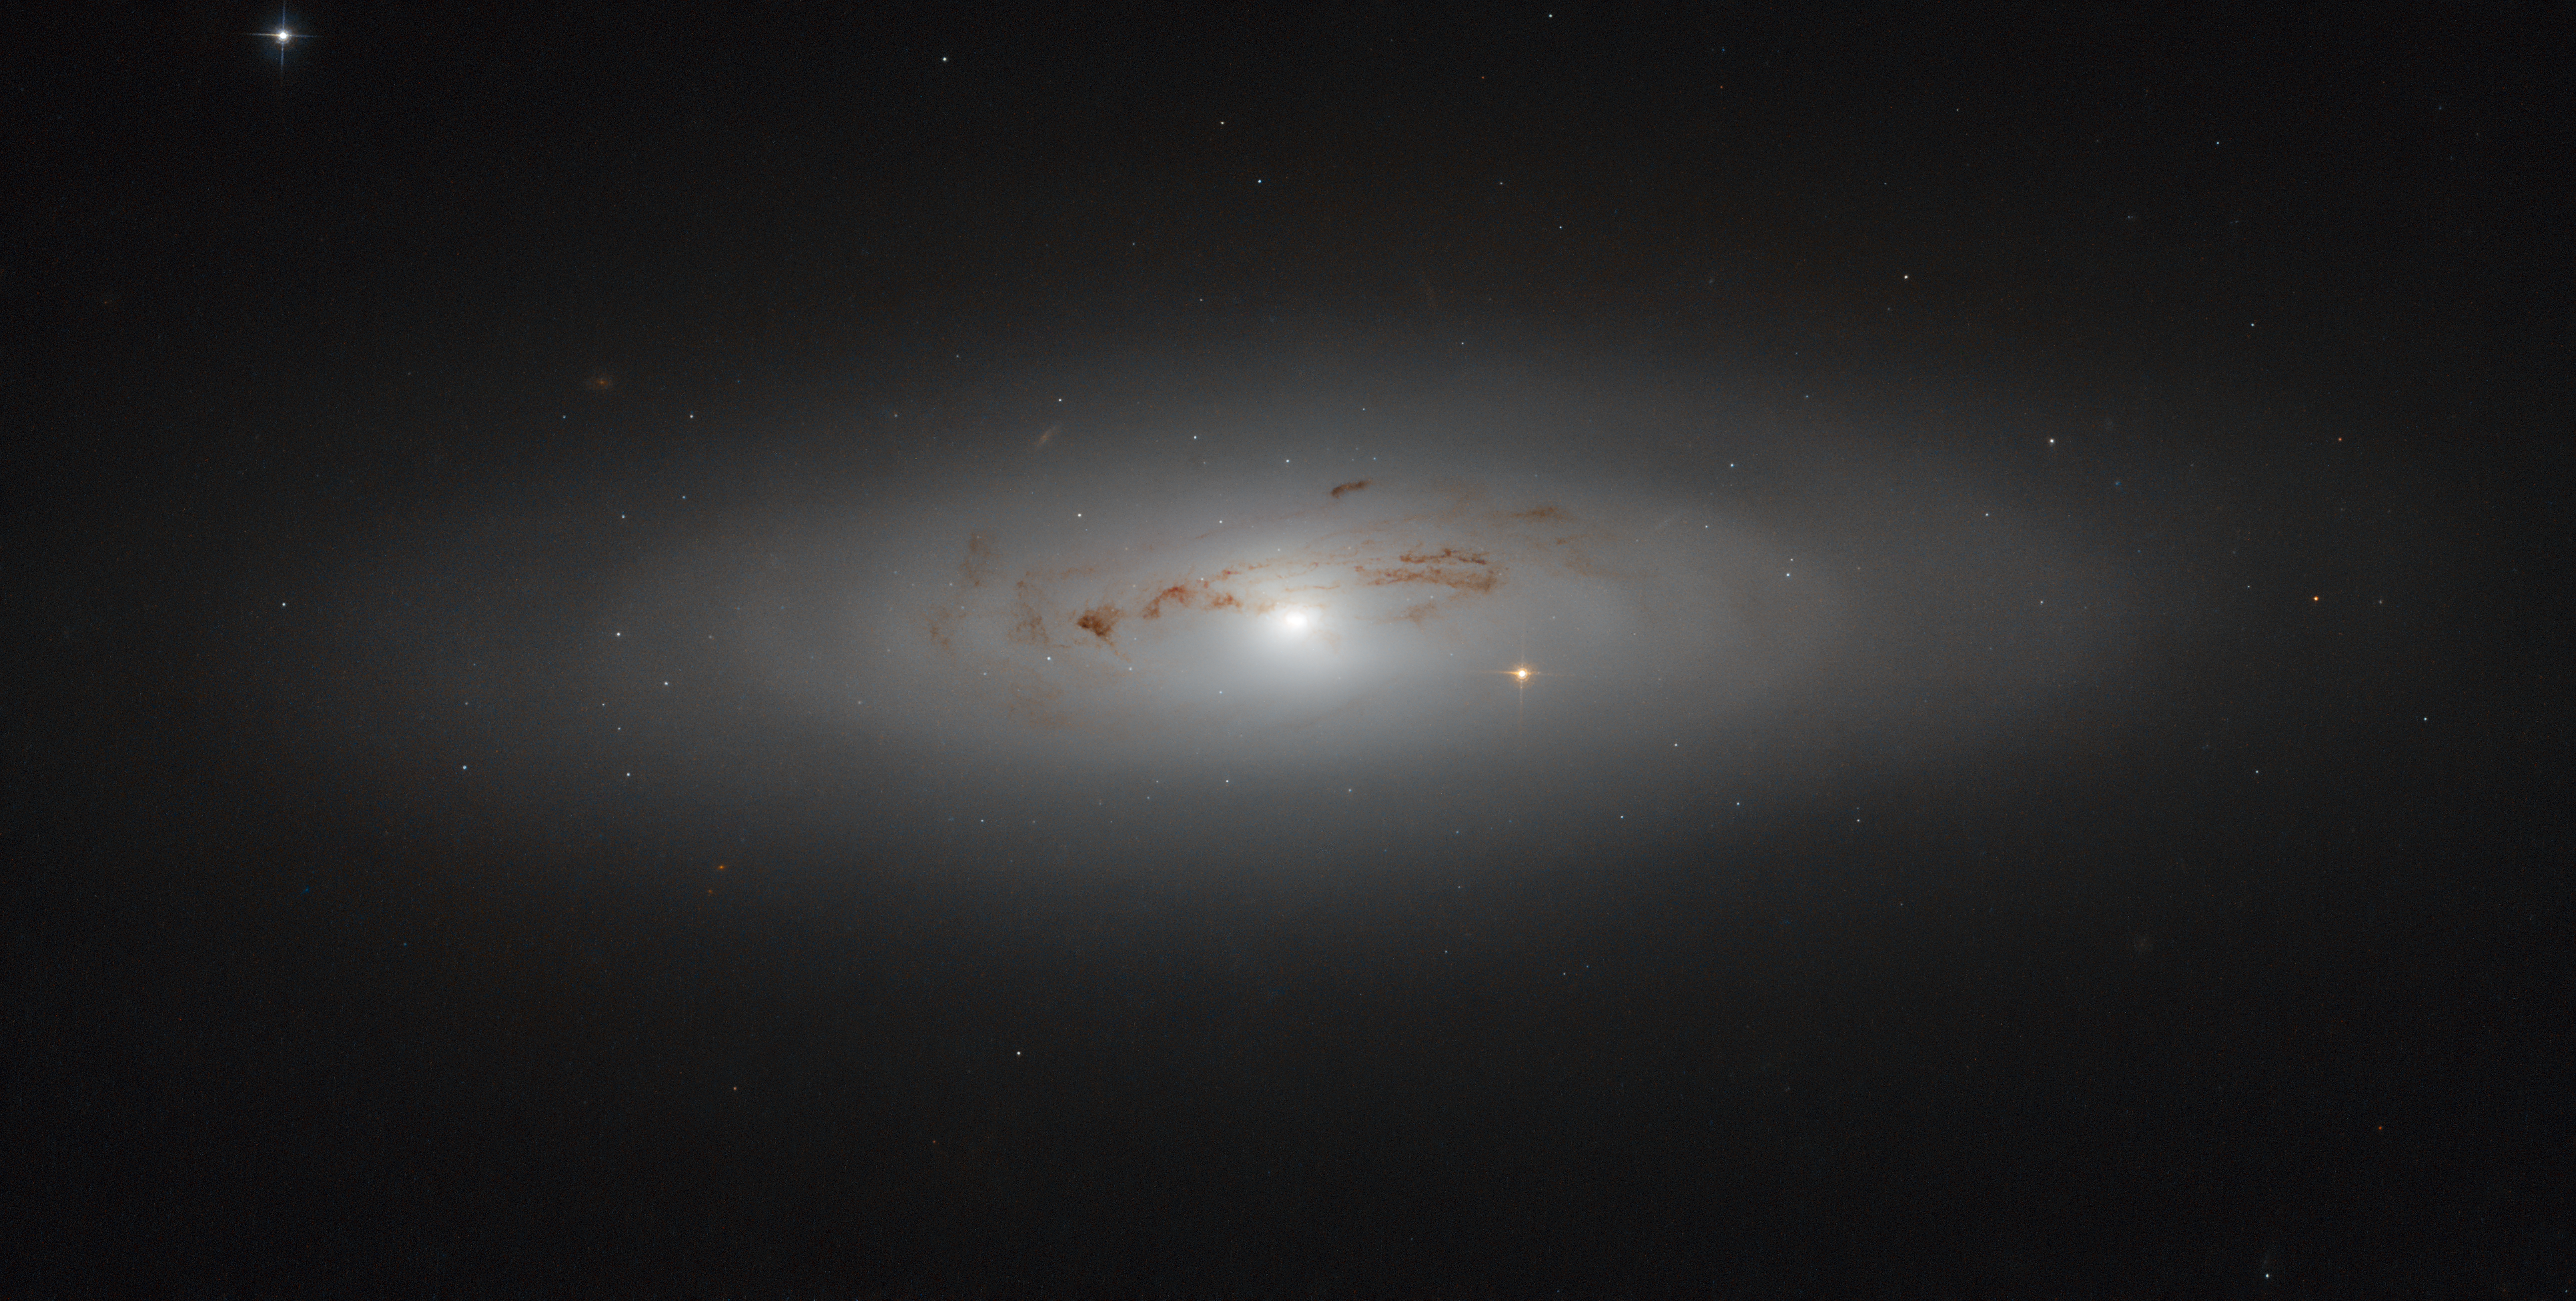

Hazy dust in Ursa Major

This week’s NASA/ESA Hubble Space Telescope image showcases the galaxy NGC 4036: a lenticular galaxy some 70 million light-years away in the constellation of Ursa Major (the Great Bear).

This galaxy is known for its irregular lanes of dust, which form a swirling spiral pattern around the centre of the galaxy. This core is surrounded by an extended, hazy aura of gas and dust that stretches further out into space and causes the warm, fuzzy glow that can be seen here. The centre itself is also intriguing; it is something known as a LINER-type (Low-Ionisation Nuclear Emission-line Region) galactic nucleus, meaning that it displays particular emission lines within its spectrum. The particularly bright star visible slightly to the right of the galactic centre is not within the galaxy itself; it sits between us and NGC 4036, adding a burst of brightness to the scene.

Due to its relative brightness, this galaxy can be seen using an amateur telescope, making it a favourite amongst backyard astronomers and astrophotography aficionados.

Credit: ESA/Hubble & NASA Acknowledgement: Judy Schmidt